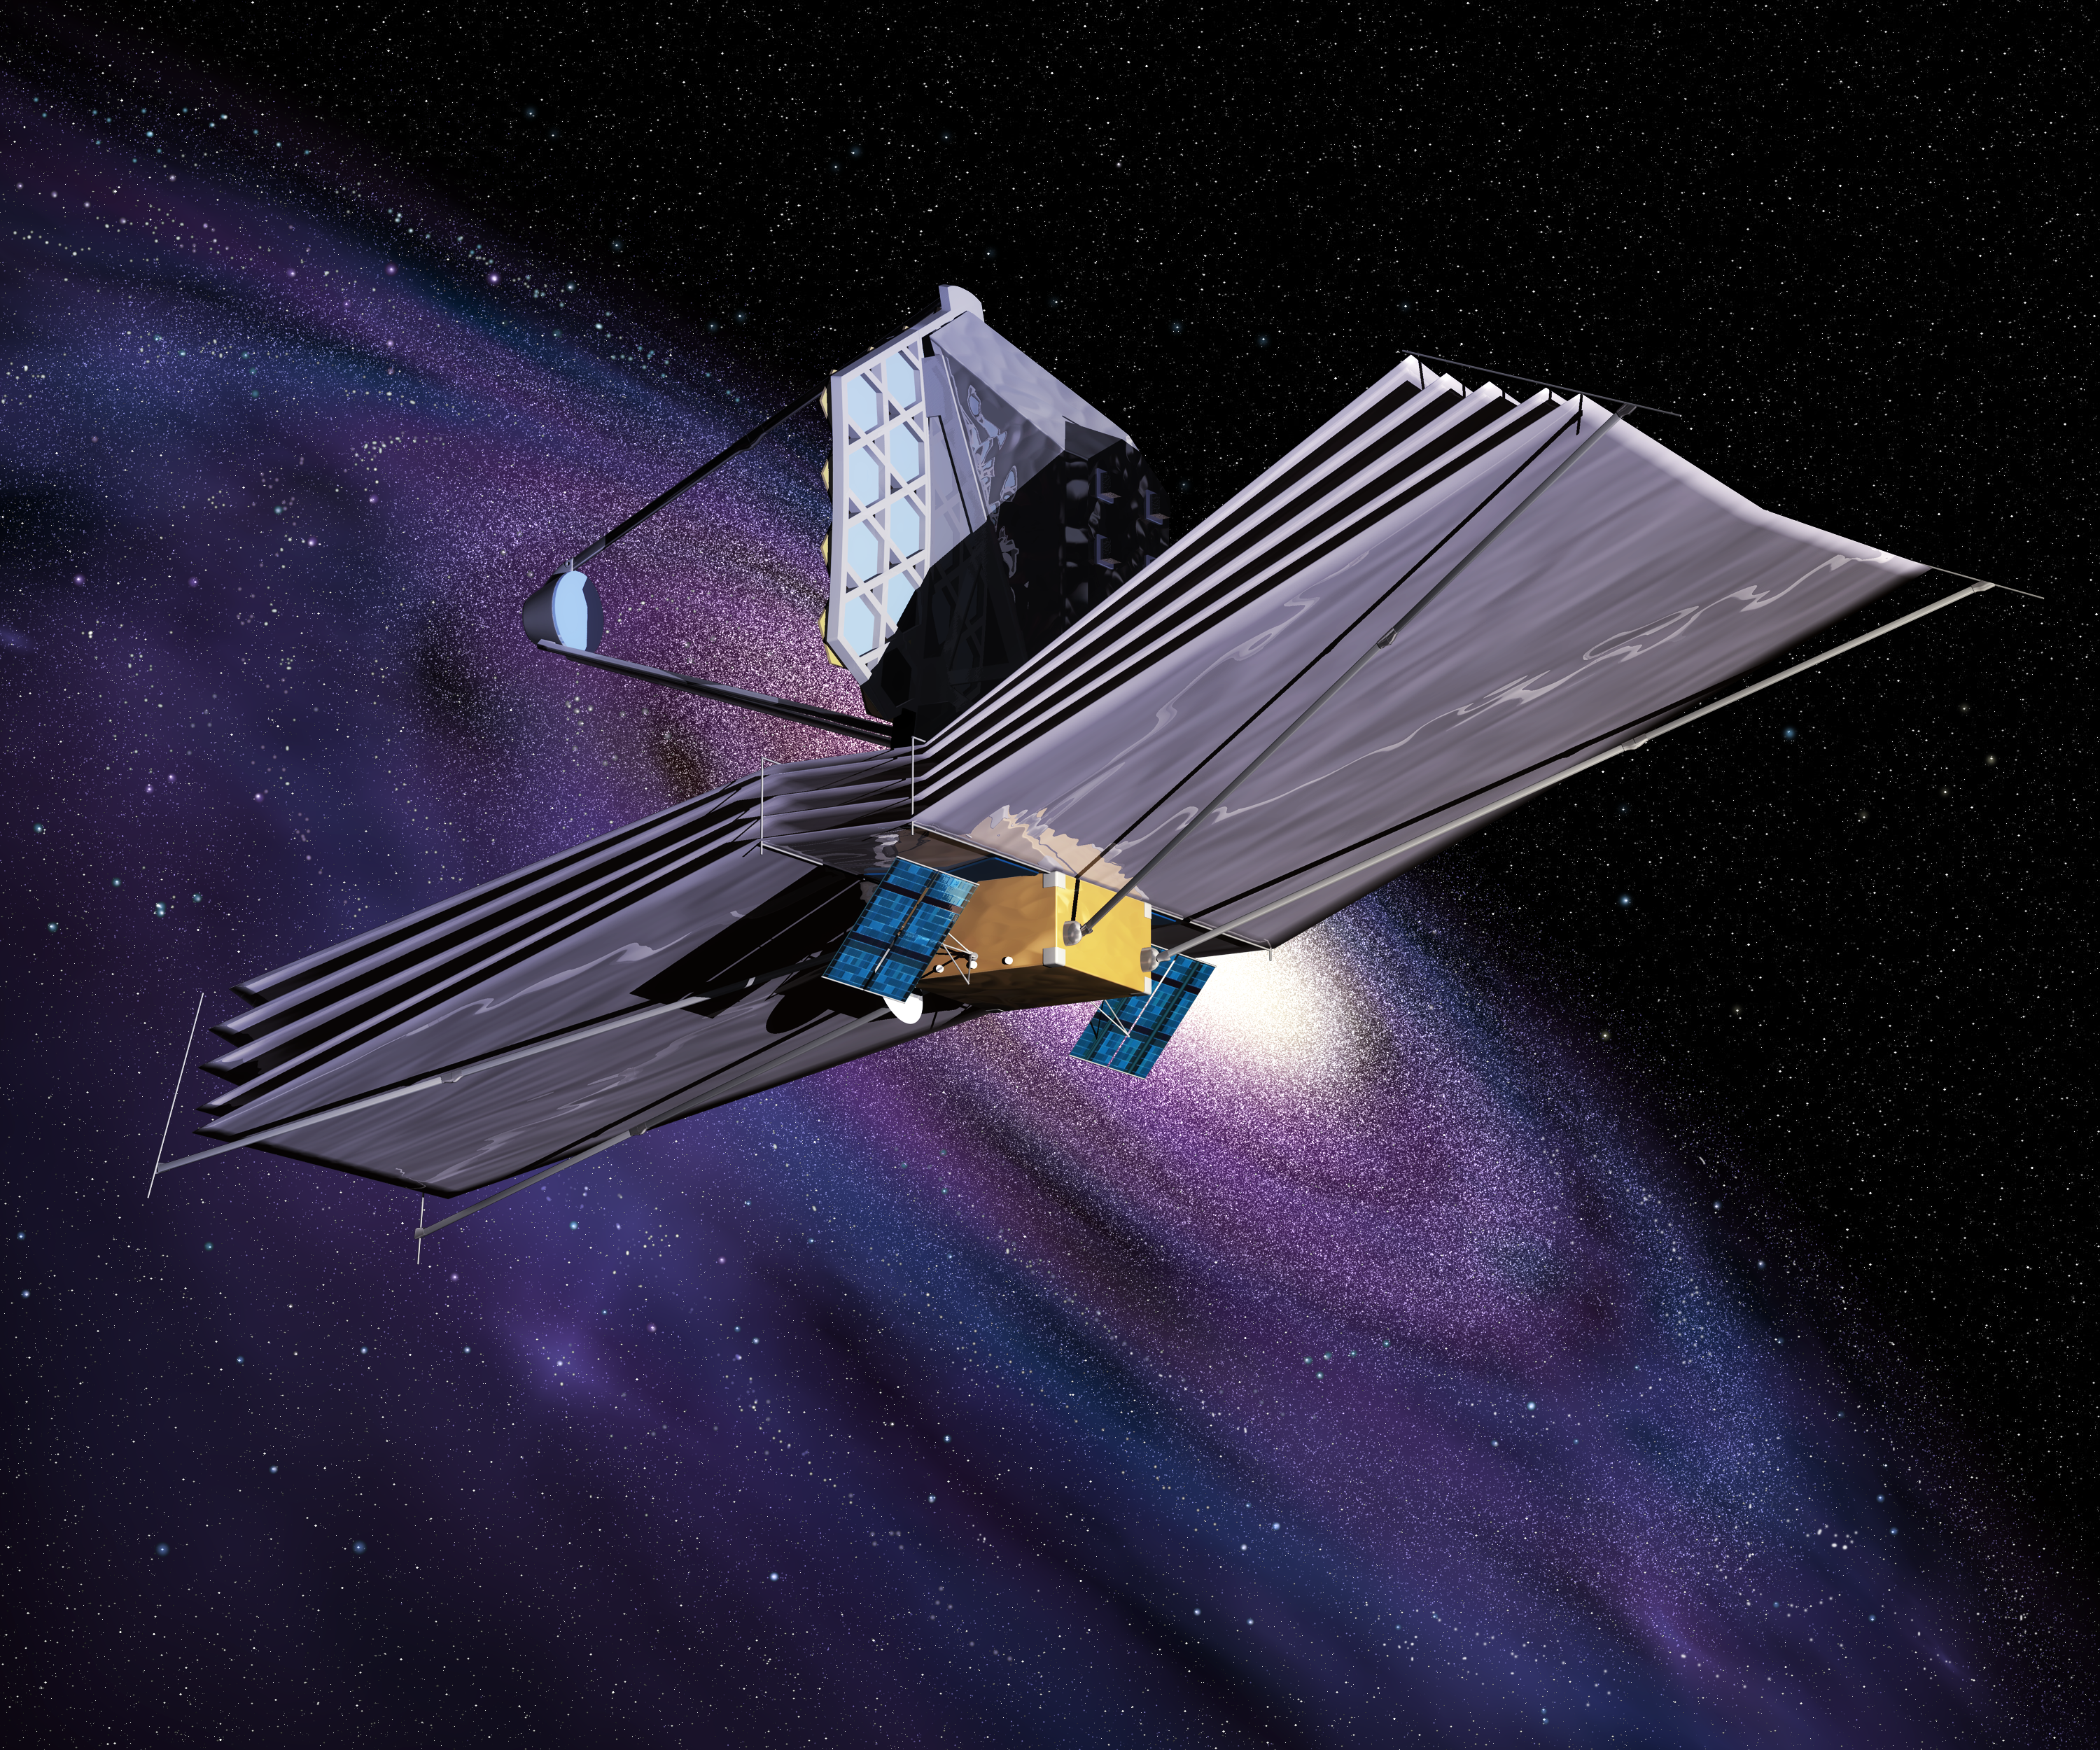

The James Webb Space Telescope (artist's impression)

The blue coloured solar panels of the JWST are attached to the main spacecraft bus, which contains the propulsion subsystem...essential for maintaining the telescope's orbit.

Credit: ESA